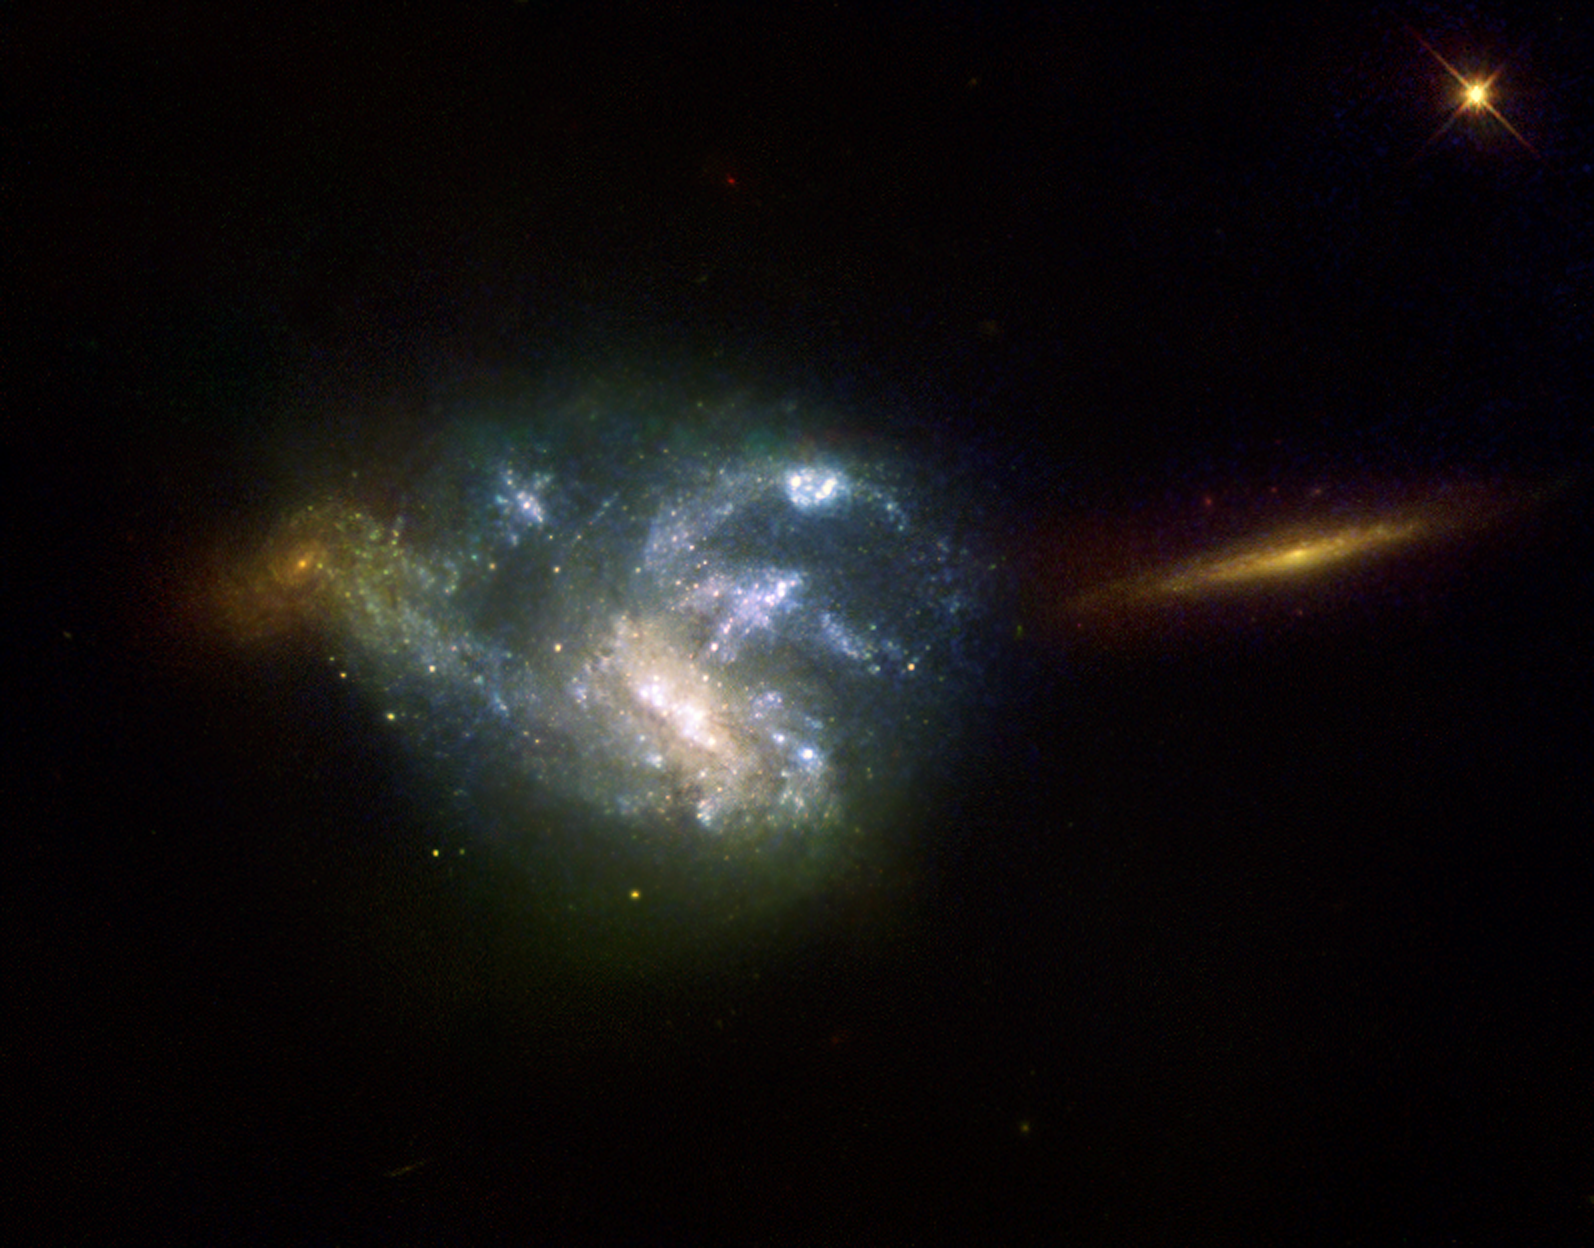

Hyperactive galaxy NGC 7673

The galaxy NGC 7673 is located in the constellation of Pegasus at an approximate distance of 150 million light-years. This picture is composed of three images obtained with Hubble's Wide Field Planetary Camera 2 on 15 October 1996 and 11 October 1997. The three images were taken through a red filter (800 seconds), a green filter (1200 seconds) and an ultraviolet filter (2300 seconds) - shown in blue. Telltale patches of blue light are signs of the formation of millions of new stars in the tangled spiral galaxy NGC 7673. Each of the bluish areas in this image consists of immense star clusters containing thousands of young stars. These clusters lie on the spiral arms of NGC 7673 and so emphasise its somewhat ragged look. this image, taken form Earth orbit by the ESA/NASA/ESA Hubble Space Telescope in 1996 and 1997, also shows two other galaxies seen in the background of the image, to the left and right of NGC 7673. these galaxies are further away and so appear redder, due to their higher redshift, an effect caused by the expansion of the Universe. The youngest blue stars in NGC 7673 are blazing with intense ultraviolet radiation. Each star cluster radiates 100 times more ultraviolet light than the famous Tarantula Nebula (30 Doradus), the largest star-forming region known in the local group of galaxies.

Credit: European Space Agency & Nicole Homeier (European Southern Observatory and University of Wisconsin-Madison)